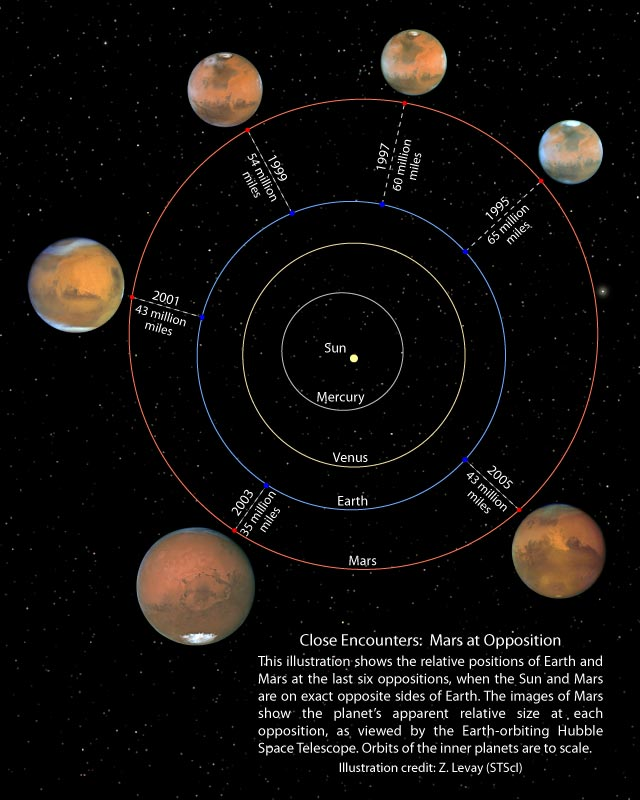

Close encounter: Mars at opposition

This illustration shows the relative positions of Eartth and Mars at the last six oppositions, when the Sun and Mars are on exact opposite sides of Earth. The images of Mars show the planet's apparant relative size at each opposition, as viewed by the Earth-orbiting Hubble Space Telescope. Orbits of the inner plannets are to scale.

Credit: NASA, ESA, and Z. Levay (STScI)